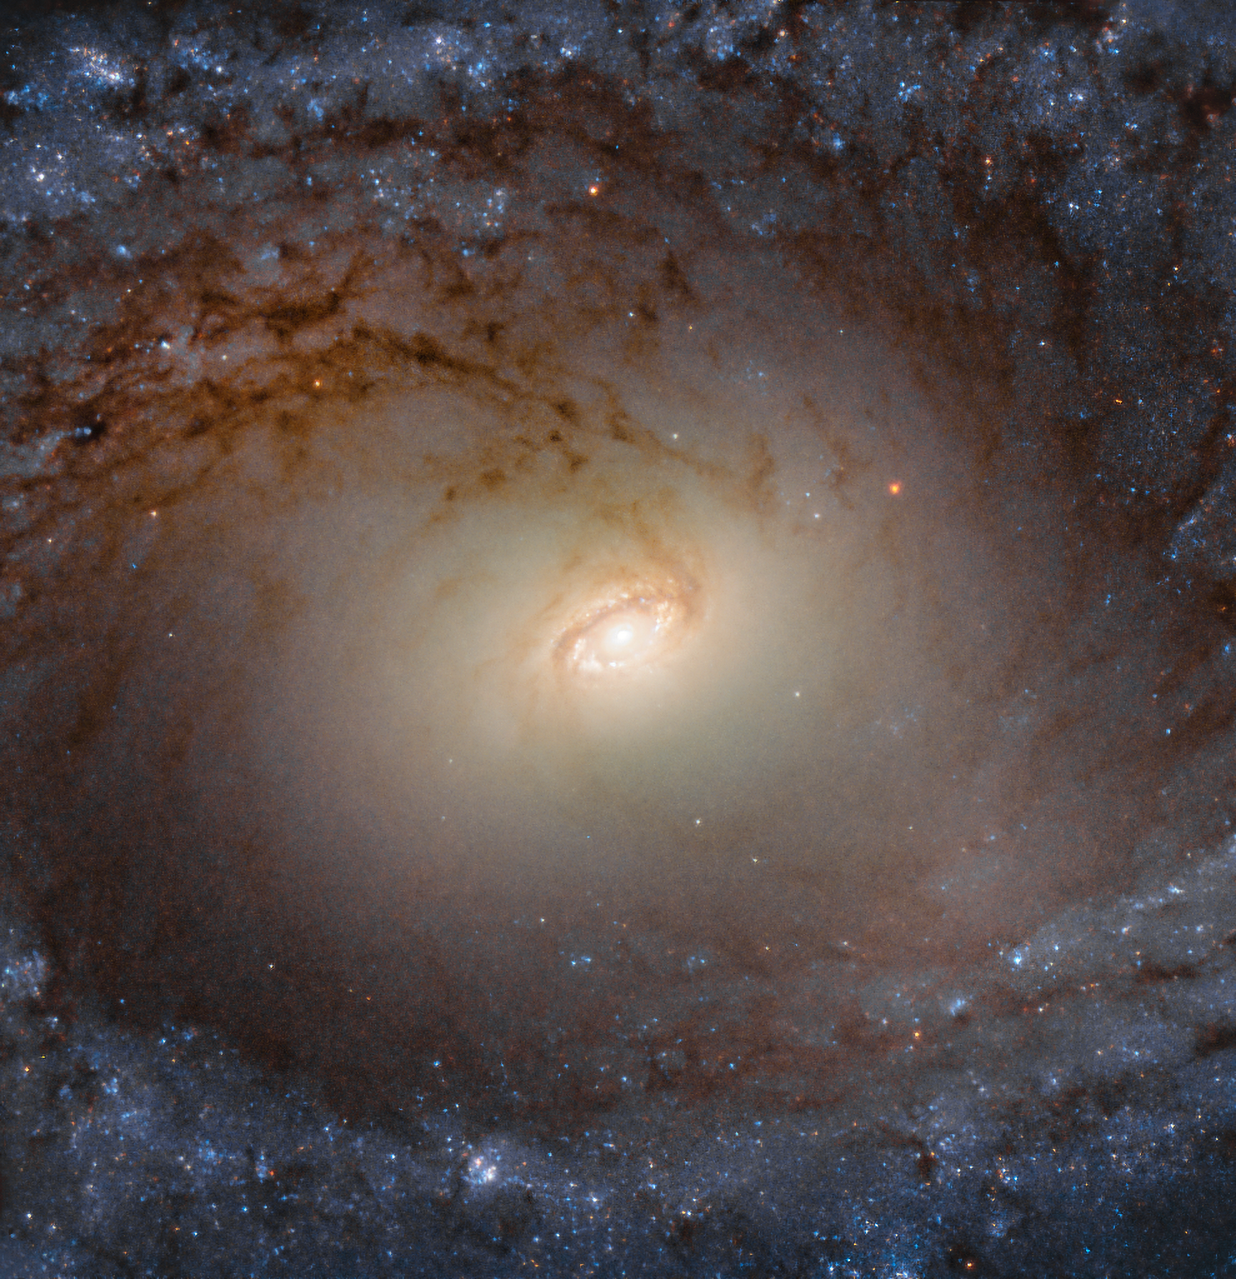

Discs and Bulges

This image from the NASA/ESA Hubble Space Telescope shows IC 2051, a galaxy in the southern constellation of Mensa (The Table Mountain), lying about 85 million light-years away. It is a spiral galaxy, as evidenced by its characteristic whirling, pinwheeling arms, and it has a bar of stars slicing through its centre.

This galaxy was observed for a Hubble study on galactic bulges, the bright round central region of spiral galaxies. Spiral galaxies like IC 2051 are shaped a bit like flying saucers when seen from the side; they comprise a thin, flat disc, with a bulky bulge of stars in the centre that extends above and below the disc. These bulges are thought to play a key role in how galaxies evolve, and to influence the growth of the supermassive black holes lurking at the centres of most spirals. While more observations are needed in this area, studies suggest that some, or even most, galactic bulges may be complex composite structures rather than simple ones, with a mix of spherical, disc-like, or boxy components, potentially leading to a wide array of bulge morphologies in the Universe.

This image comprises data from Hubble’s Wide Field Camera 3 at visible and infrared wavelengths.

Credit: ESA/Hubble & NASA, P. Erwin et al.